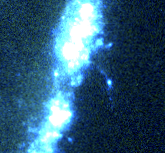

The Cartwheel Galaxy

Hubble's detailed view shows the knot-like structure of the ring, produced by large clusters of new star formation. Hubble also resolves the effects of thousands of supernovae on the ring structure. One flurry of explosions blew a hole in the ring and formed a giant bubble of hot gas. Secondary star formation on the edge of this bubble appears as an arc extending beyond the ring.

Credit: Kirk Borne (ST ScI), and NASA/ESA